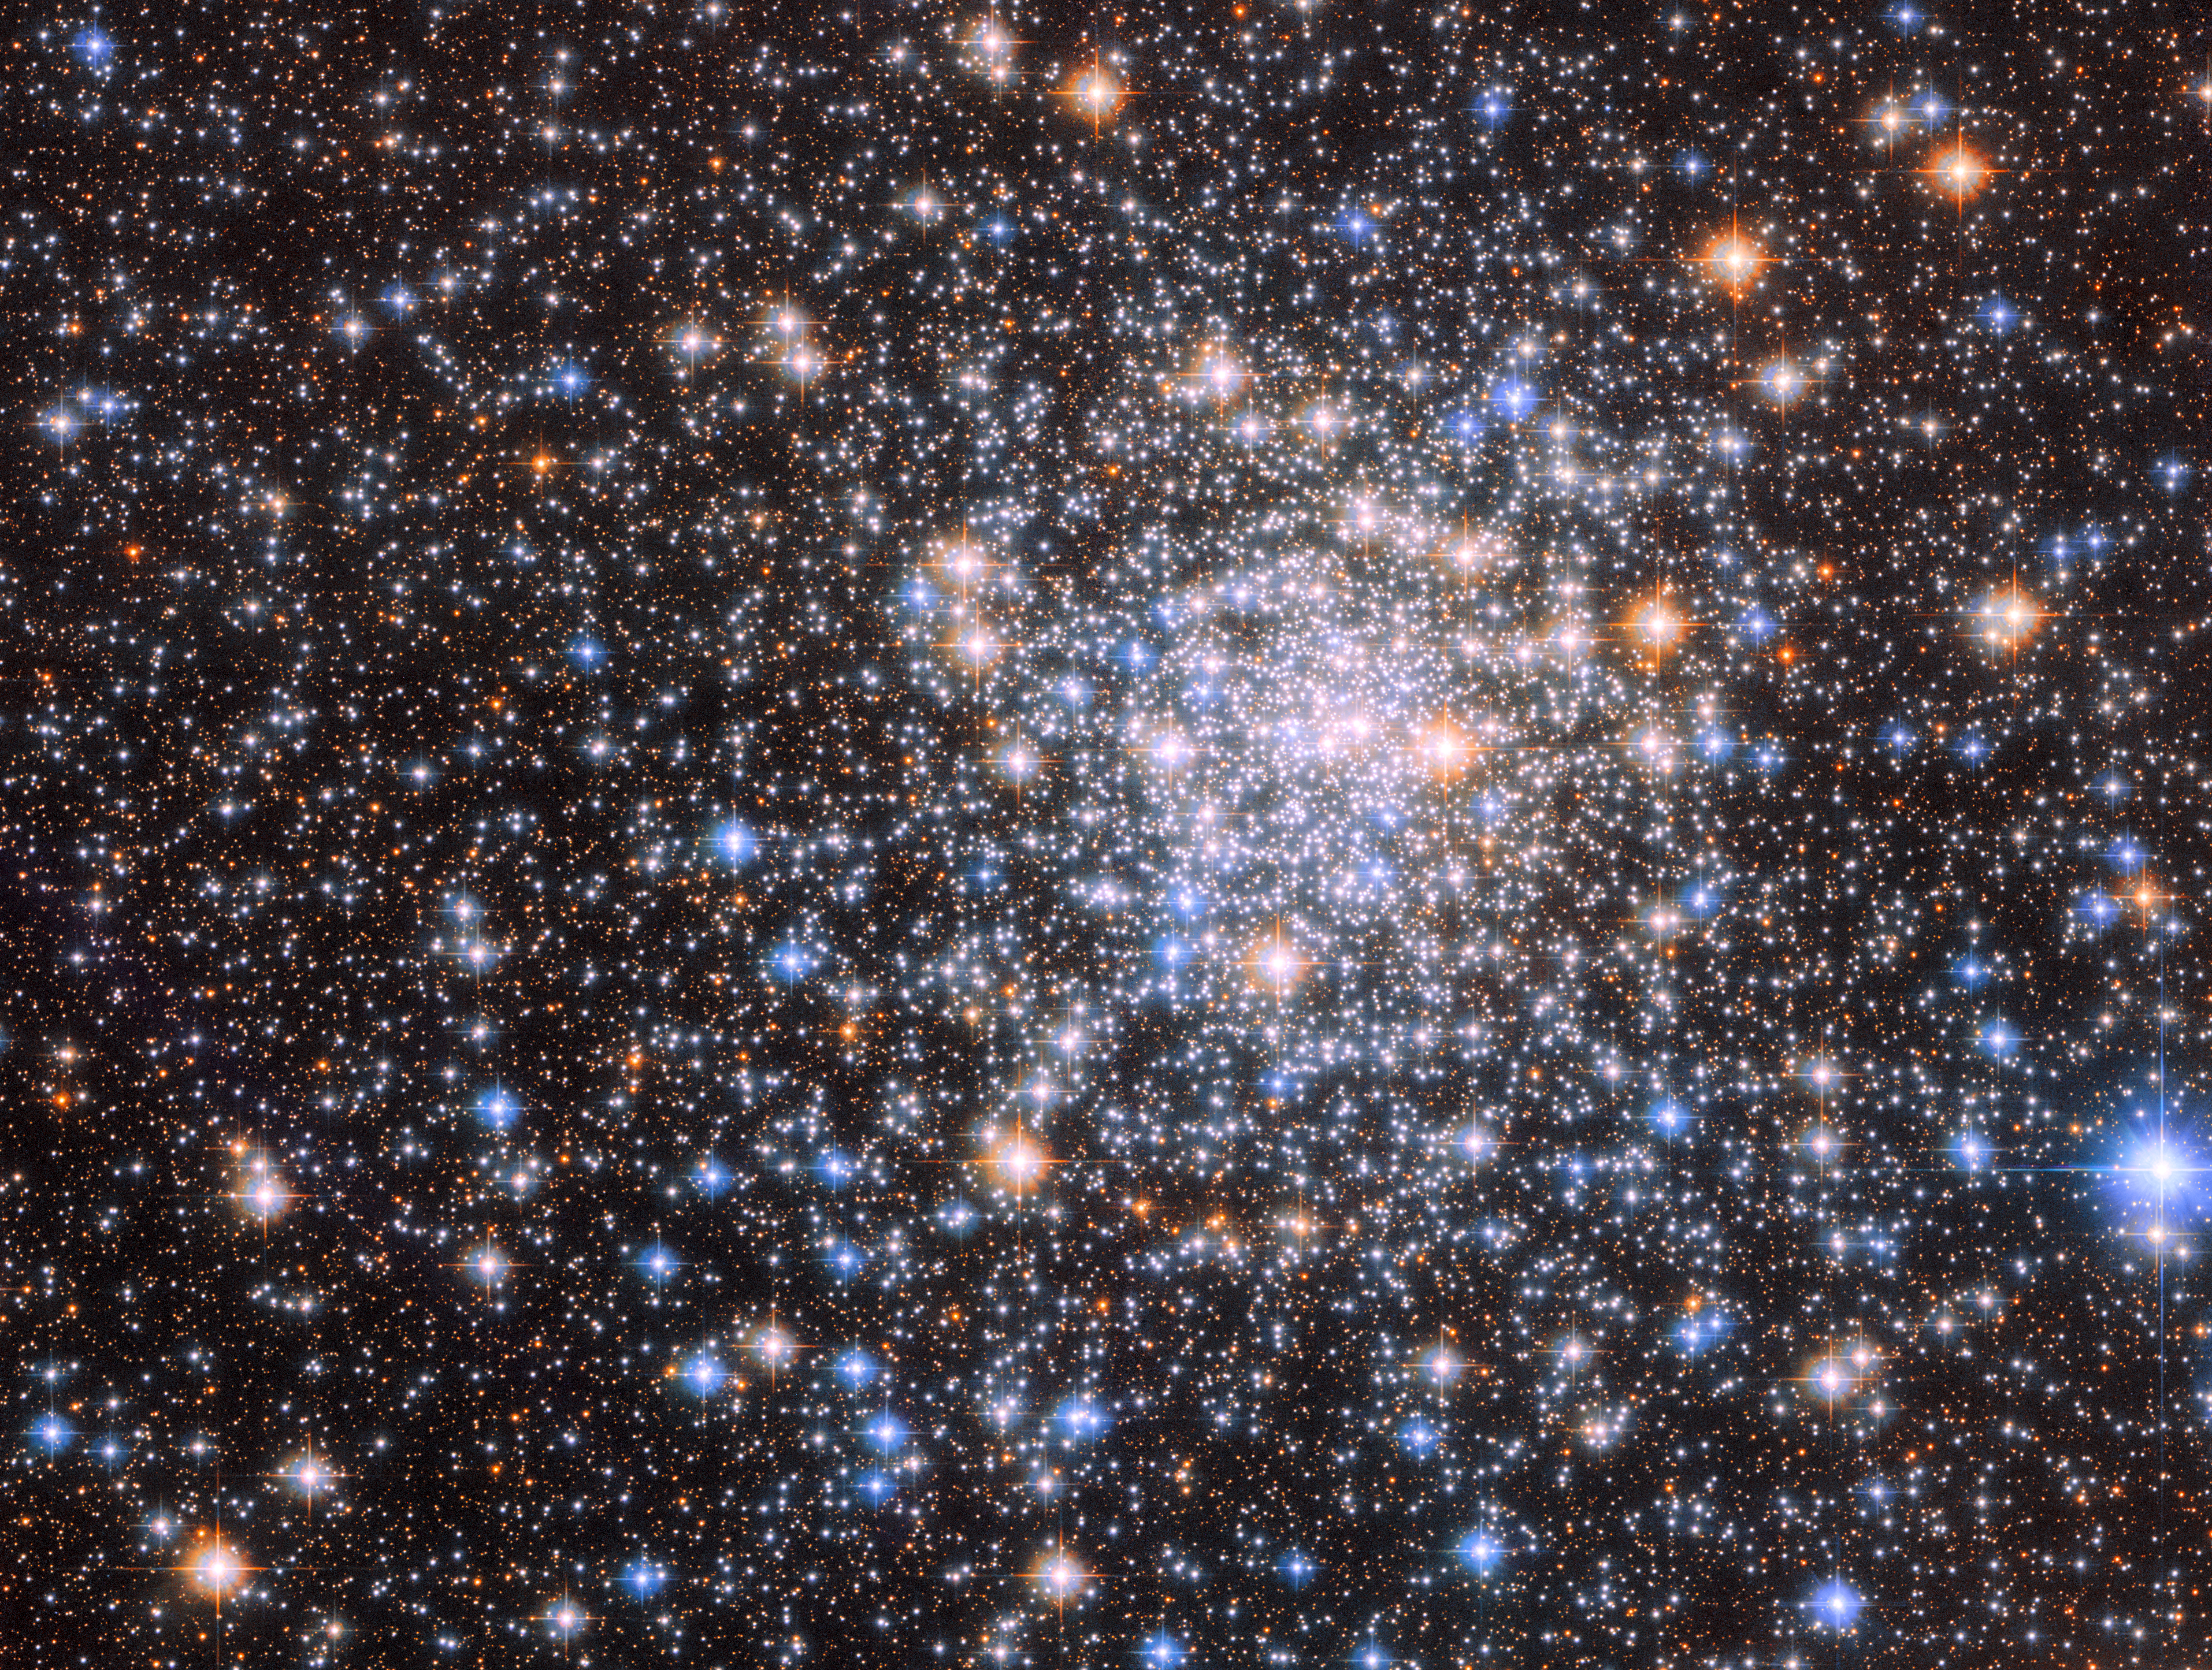

On the edge of the Lagoon

The teeming stars of the globular cluster NGC 6544 glisten in this image from the NASA/ESA Hubble Space Telescope. This cluster of tightly bound stars lies more than 8000 light-years away from Earth and is — like all globular clusters — a densely populated region of tens of thousands of stars.

This image of NGC 6544 combines data from two of Hubble’s instruments — the Advanced Camera for Surveys and Wide Field Camera 3 — as well as two separate astronomical observations. The first observation was designed to find a visible counterpart to the radio pulsar discovered in NGC 6544. A pulsar is the rapidly spinning remnant of a dead star, emitting twin beams of electromagnetic radiation like a vast astronomical lighthouse. This pulsar rotates particularly quickly, and astronomers turned to Hubble to help determine how this object evolved in NGC 6544.

The second observation which contributed data to this image was also designed to find the visible counterparts of objects detected at other electromagnetic wavelengths. Instead of matching up sources to a pulsar, however, astronomers used Hubble to search for the counterparts of faint X-ray sources. Their observations could help explain how clusters like NGC 6544 change over time.

NGC 6544 lies in the constellation Sagittarius, close to the vast Lagoon Nebula, a hazy labyrinth of gas and dust sculpted by the fierce winds of newly born stars. The Lagoon Nebula is truly colossal — even by astronomical standards — and measures 55 light-years across and 20 light-years from top to bottom. Previous Hubble images of the nebula incorporated infrared observations to reveal young stars and intricate structures that would be obscured at visible wavelengths by clouds of gas and dust.

Credit: ESA/Hubble & NASA, W. Lewin, F. R. Ferraro